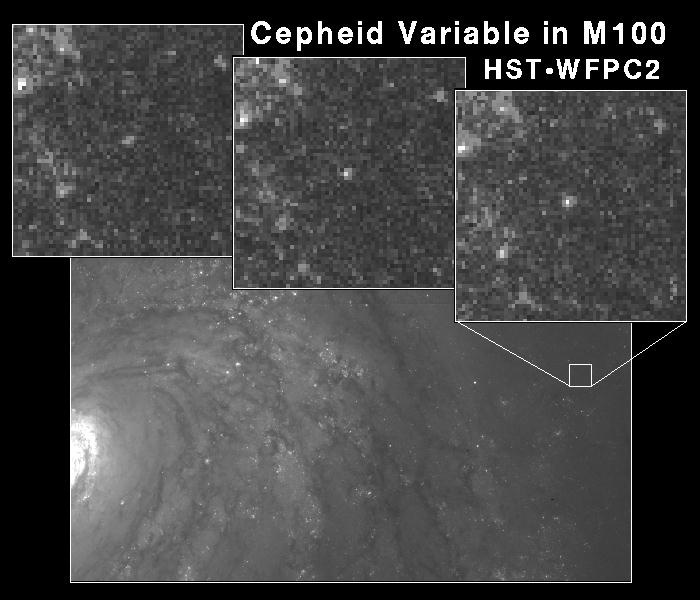

Cepheid Variable Star in Galaxy M100

This Hubble Space Telescope image of a region in the galaxy M100 shows a class of pulsating star called a Cepheid Variable. Though rare, these stars are reliable distance indicators to galaxies.

Credit: Dr. Wendy L. Freedman, Observatories of the Carnegie Institution of Washington, and NASA/ESA